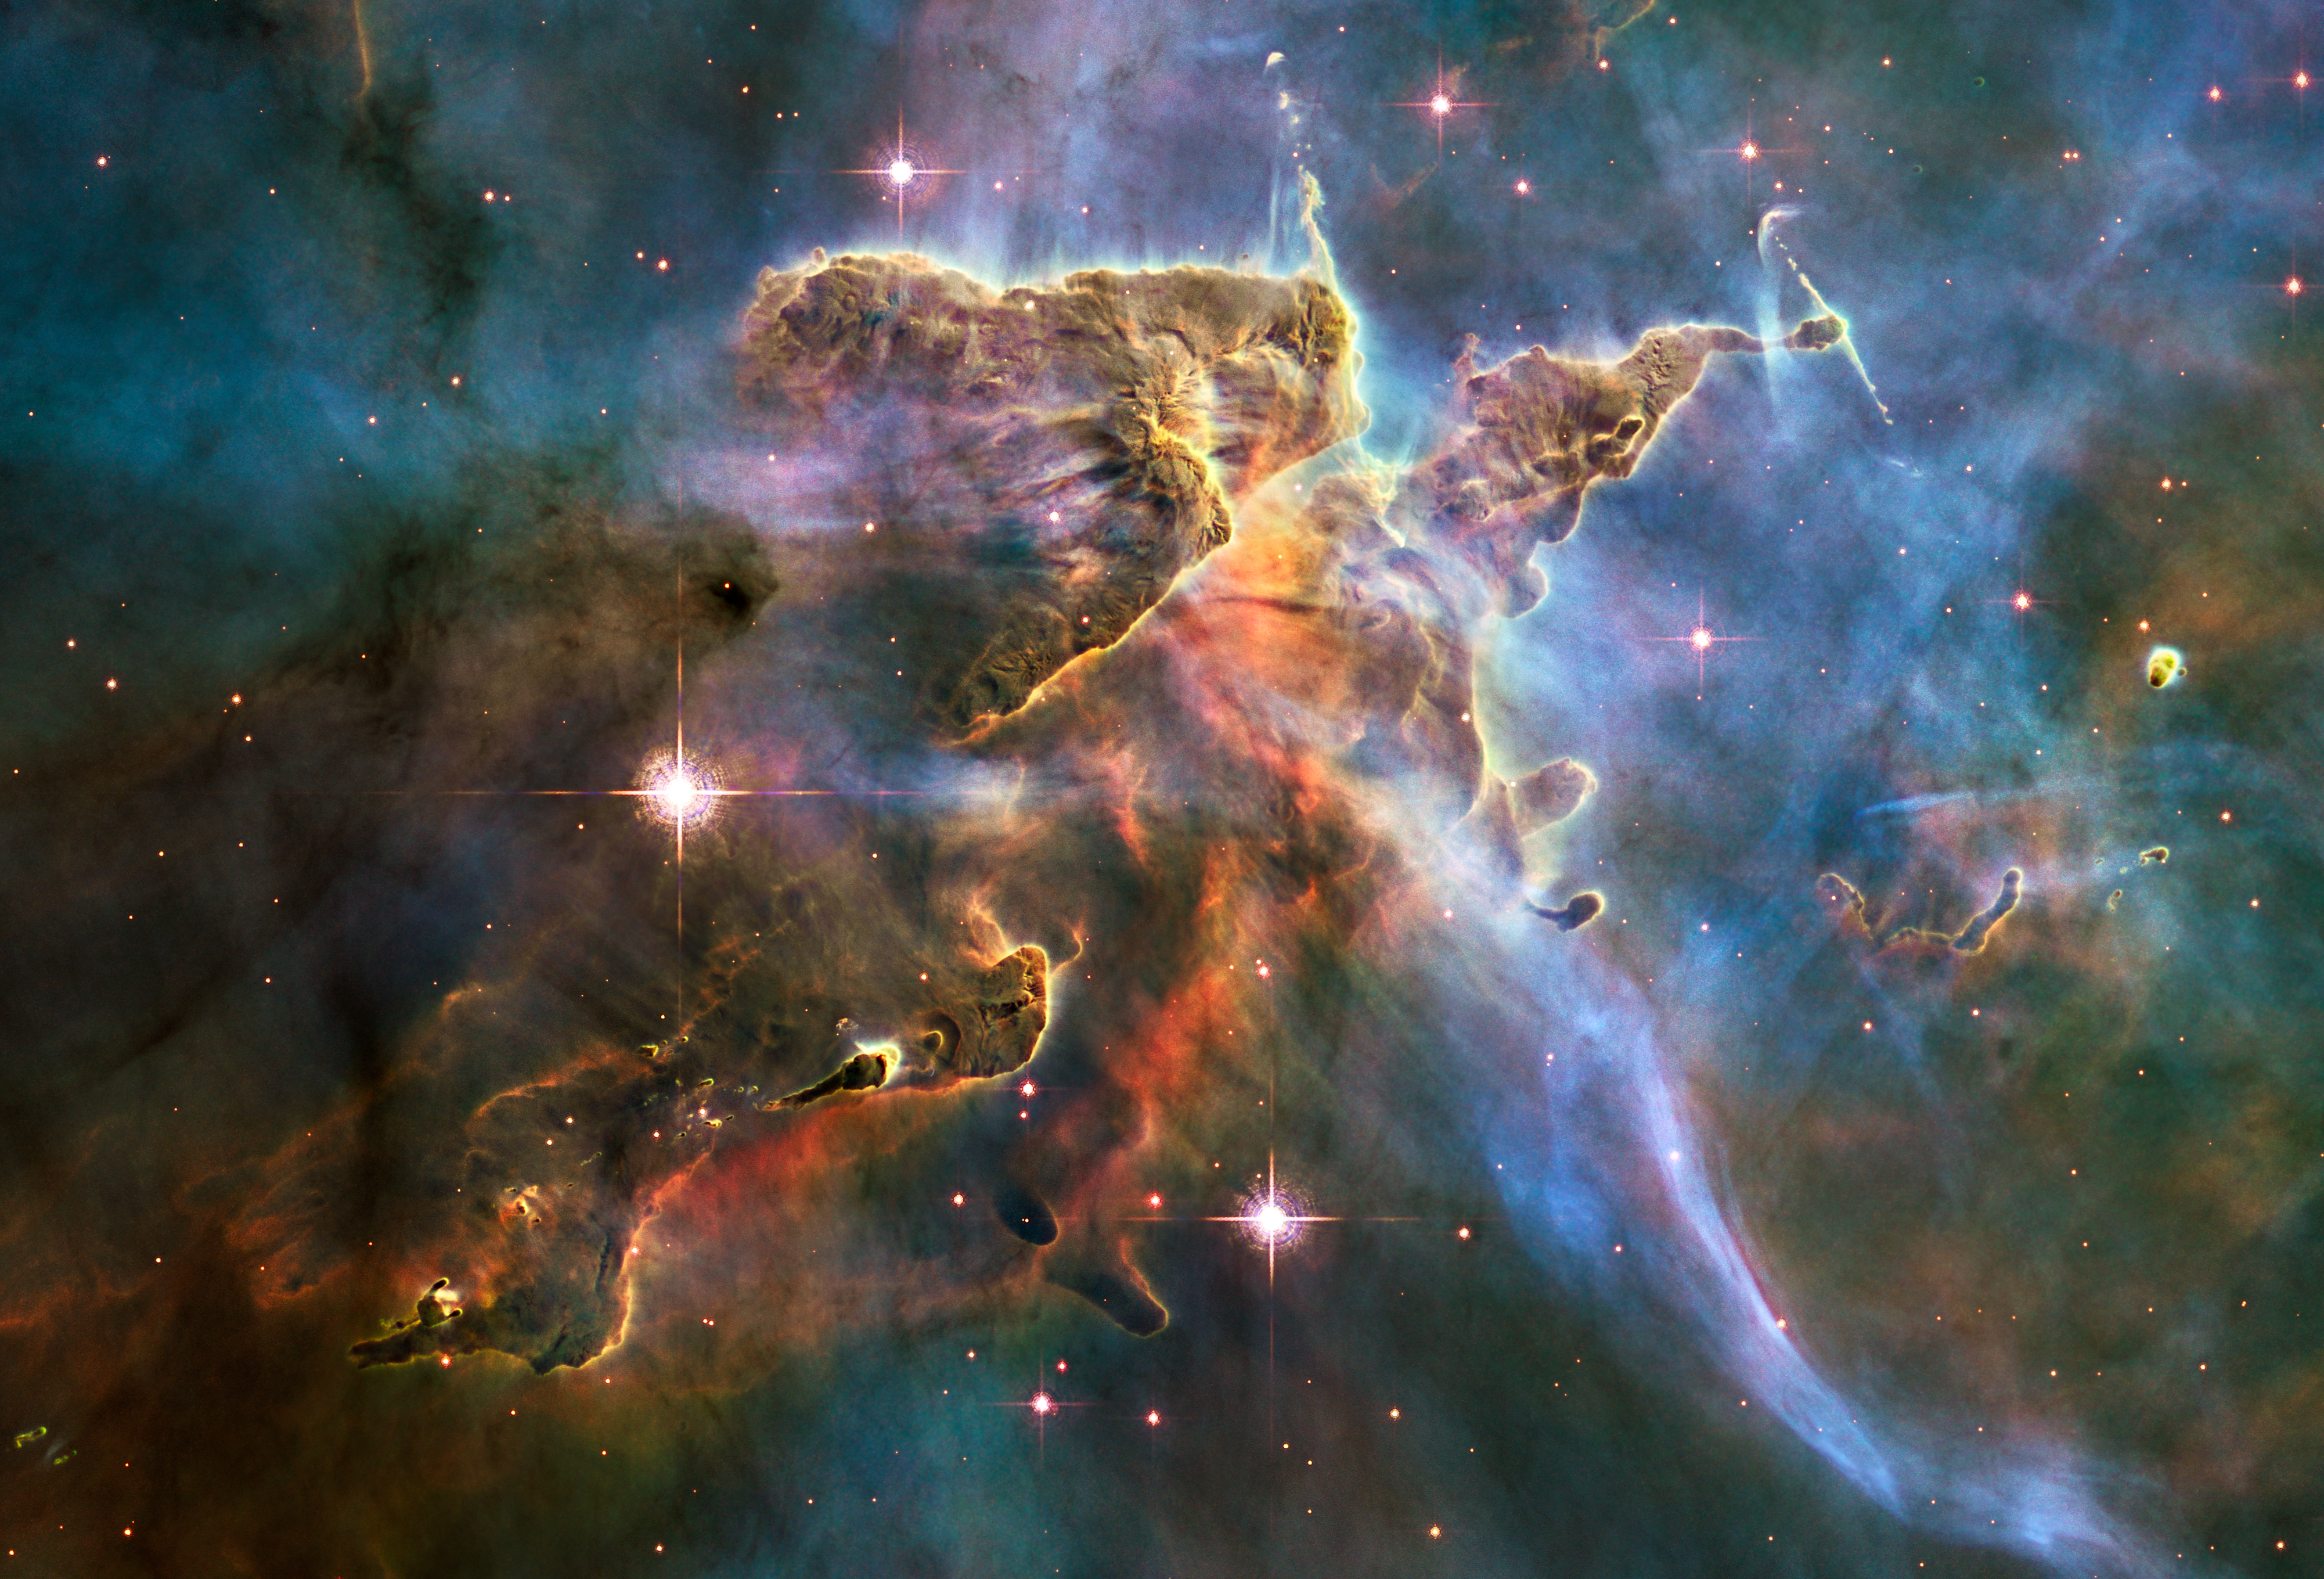

Hubble captures spectacular “landscape” in the Carina Nebula

The NASA/ESA Hubble Space Telescope captured this billowing cloud of cold interstellar gas and dust rising from a tempestuous stellar nursery located in the Carina Nebula, 7500 light-years away in the southern constellation of Carina. This pillar of dust and gas serves as an incubator for new stars and is teeming with new star-forming activity.

Hot, young stars erode and sculpt the clouds into this fantasy landscape by sending out thick stellar winds and scorching ultraviolet radiation. The low density regions of the nebula are shredded while the denser parts resist erosion and remain as thick pillars. In the dark, cold interiors of these columns new stars continue to form.

In the process of star formation, a disc around the proto-star slowly accretes onto the star's surface. Part of the material is ejected along jets perpendicular to the accretion disc. The jets have speeds of several hundreds of miles per second. As these jets plough into the surrounding nebula, they create small, glowing patches of nebulosity, called Herbig-Haro (HH) objects.

Long streamers of gas can be seen shooting in opposite directions off the pedestal on the upper right-hand side of the image. Another pair of jets is visible in a peak near the top-centre of the image. These jets (known as HH 901 and HH 902, respectively) are common signatures of the births of new stars.

This image celebrates the 20th anniversary of Hubble's launch and deployment into an orbit around Earth. Hubble's Wide Field Camera 3 observed the pillar on 1-2 February 2010. The colours in this composite image correspond to the glow of oxygen (blue), hydrogen and nitrogen (green) and sulphur (red).

Credit: NASA, ESA, and M. Livio, The Hubble Heritage Team and the Hubble 20th Anniversary Team (STScI)